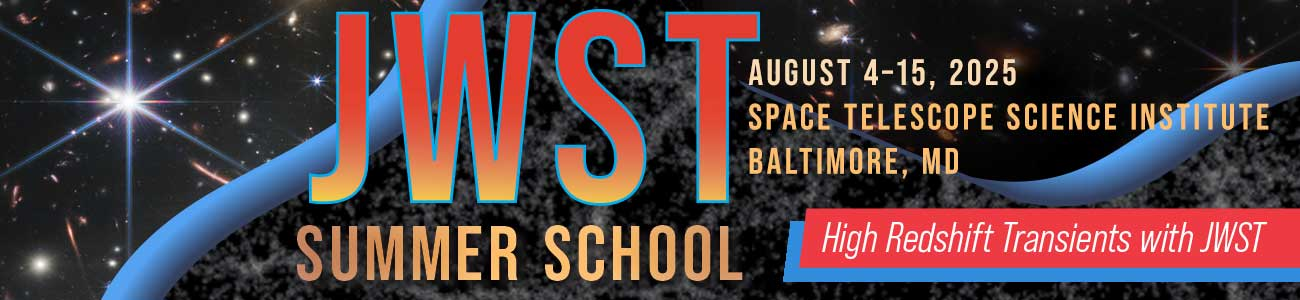

JWST Summer School

The inaugural JWST Summer School will be held at STScI on 4–15 August 2025, on the topic of high-redshift transients with JWST.>

Credit: STScI